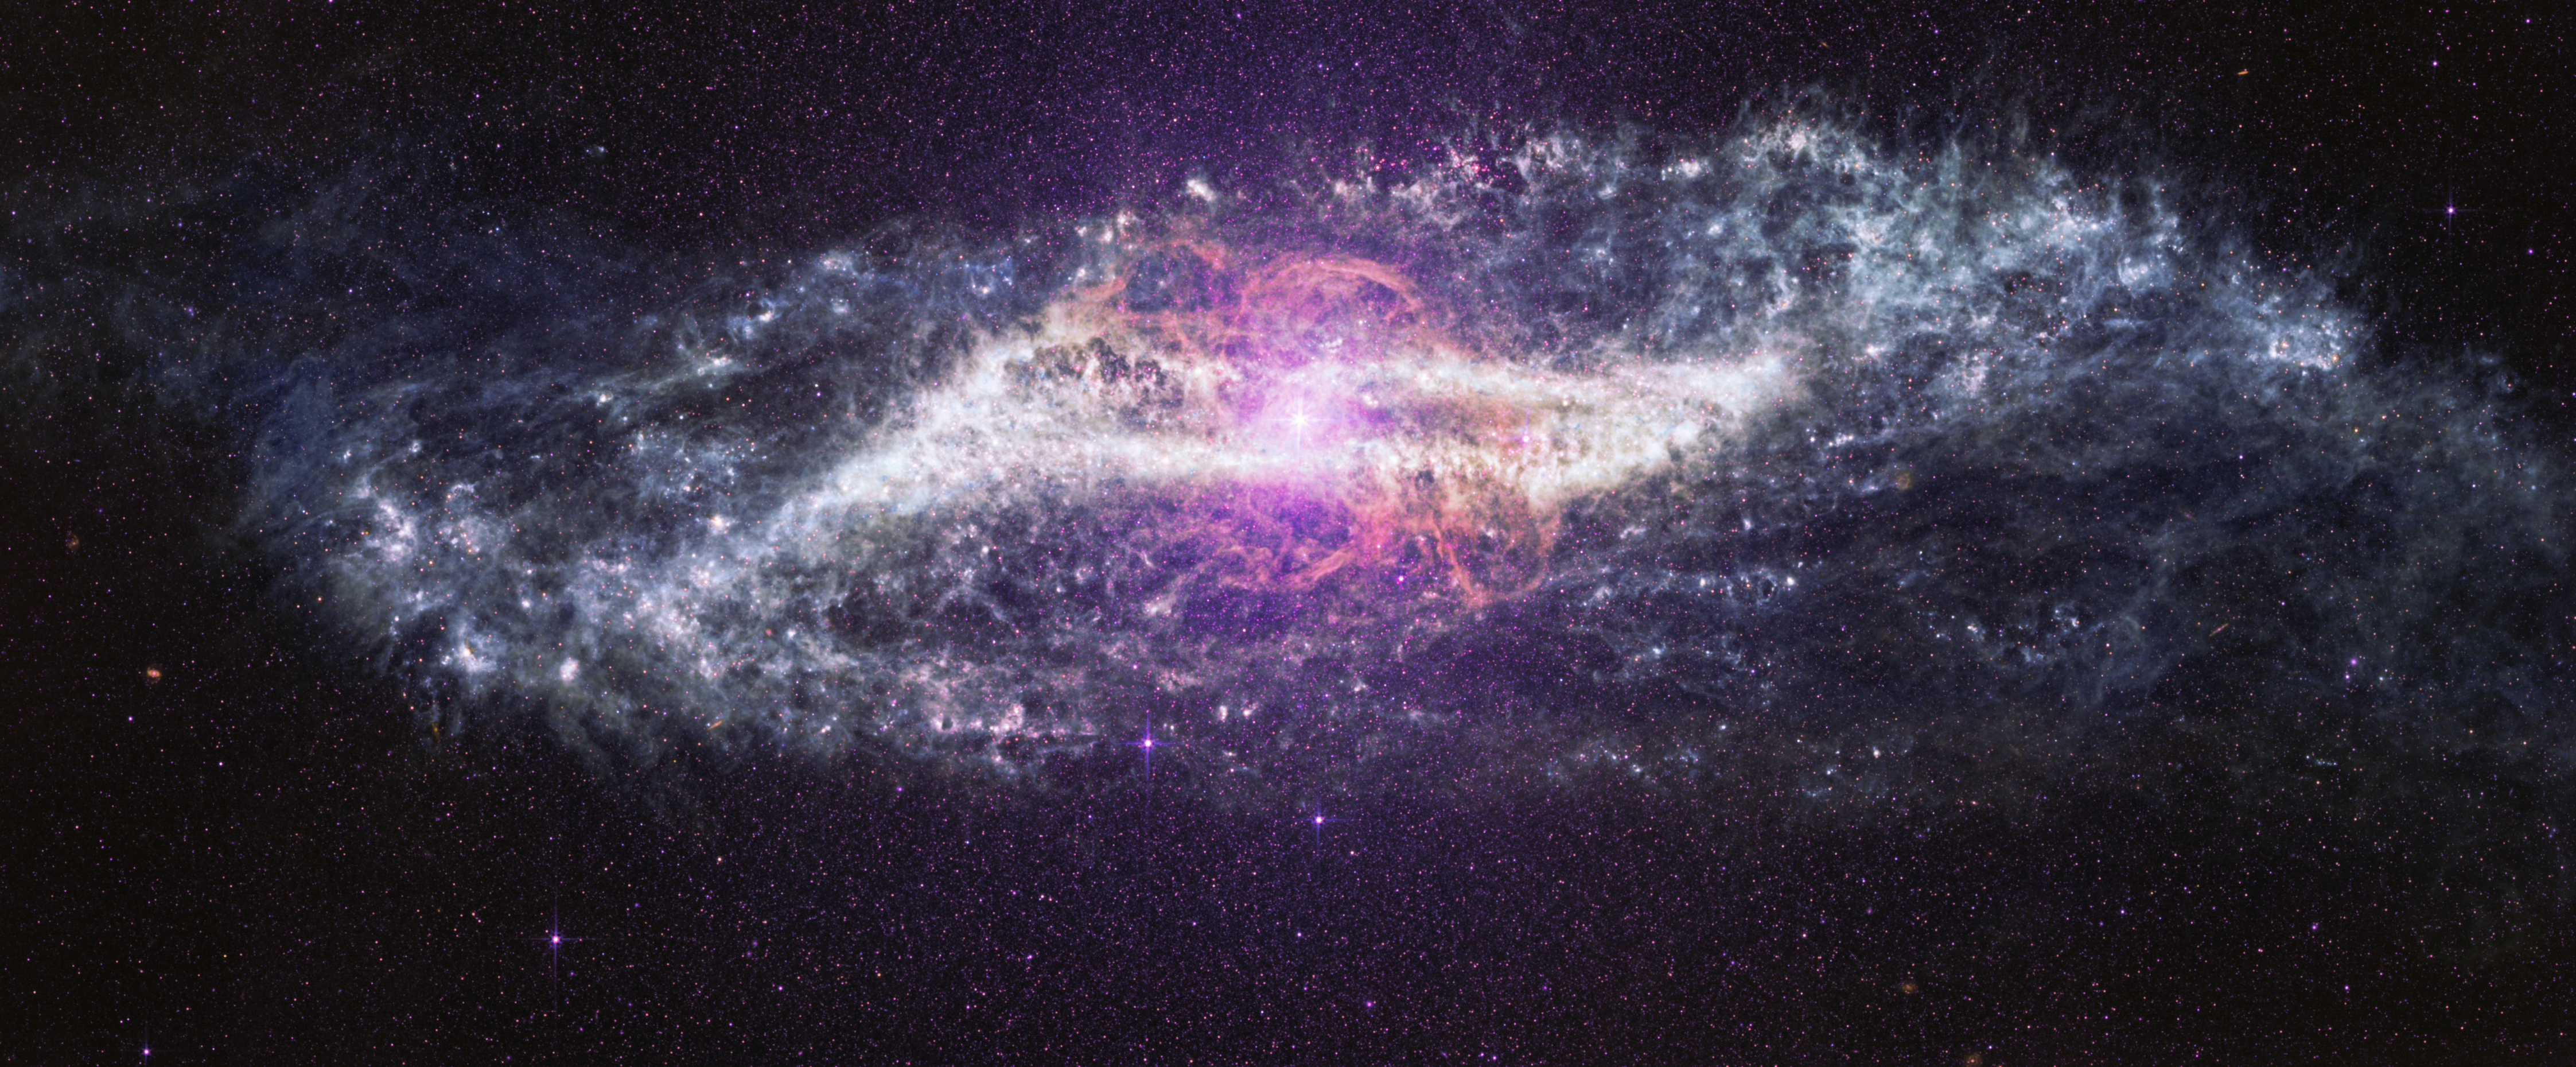

Centaurus A (MIRI image)

The NASA/ESA/CSA James Webb Space Telescope’s Mid-Infrared Instrument (MIRI) reveals the nearby galaxy Centaurus A, exposing the dusty structures and hidden activity that shape this unusual system. Webb’s infrared vision pierces thick lanes of dust that obscure much of the galaxy in visible light, unveiling intricate filaments, loops, and glowing clouds of warm dust stretching across its centre. At the heart of the galaxy, an actively feeding supermassive black hole shines brightly, surrounded by complex structures sculpted by a past galactic collision and ongoing activity.

Credit: NASA, ESA, CSA, STScI. Image Processing: A. Pagan (STScI), J. Depasquale (STScI), M. Garcia Marin (ESA Office at STScI)